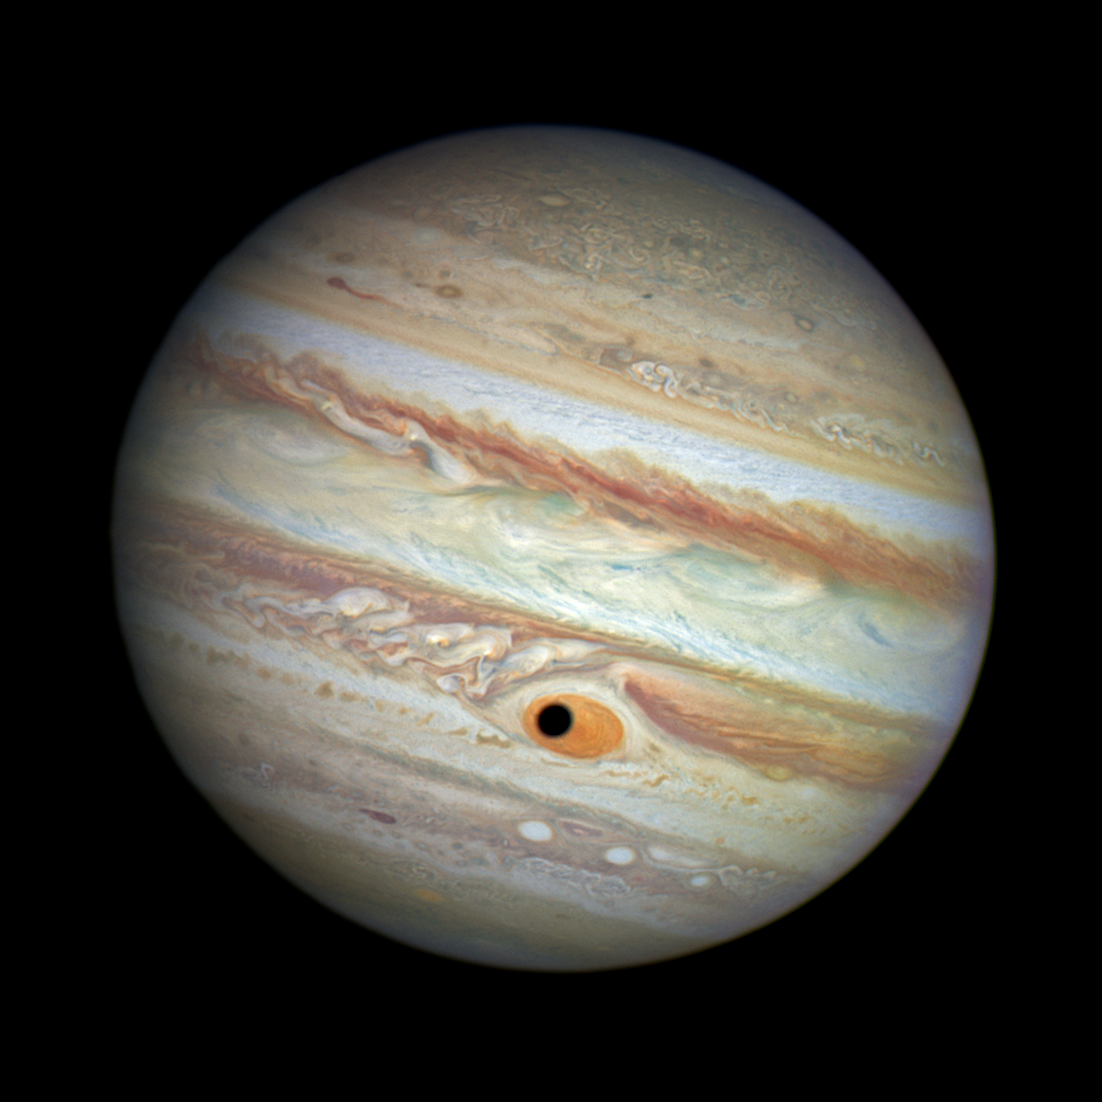

Jupiter's Great Red Spot and Ganymede's shadow — colour

This NASA/ESA Hubble Space Telescope image shows a gorgeous close-up view of the planet Jupiter.

Astronomers were using Hubble to monitor changes in Jupiter's immense Great Red Spot (GRS) storm. During the exposures, on 21 April 2014, the shadow of the Jovian moon Ganymede swept across the center of the GRS. Giving the giant planet the uncanny appearance of having a pupil in the center of a 16 000 kilometre wide eye.

Credit: NASA, ESA, and A. Simon (Goddard Space Flight Center) Acknowledgment: C. Go and the Hubble Heritage Team (STScI/AURA)